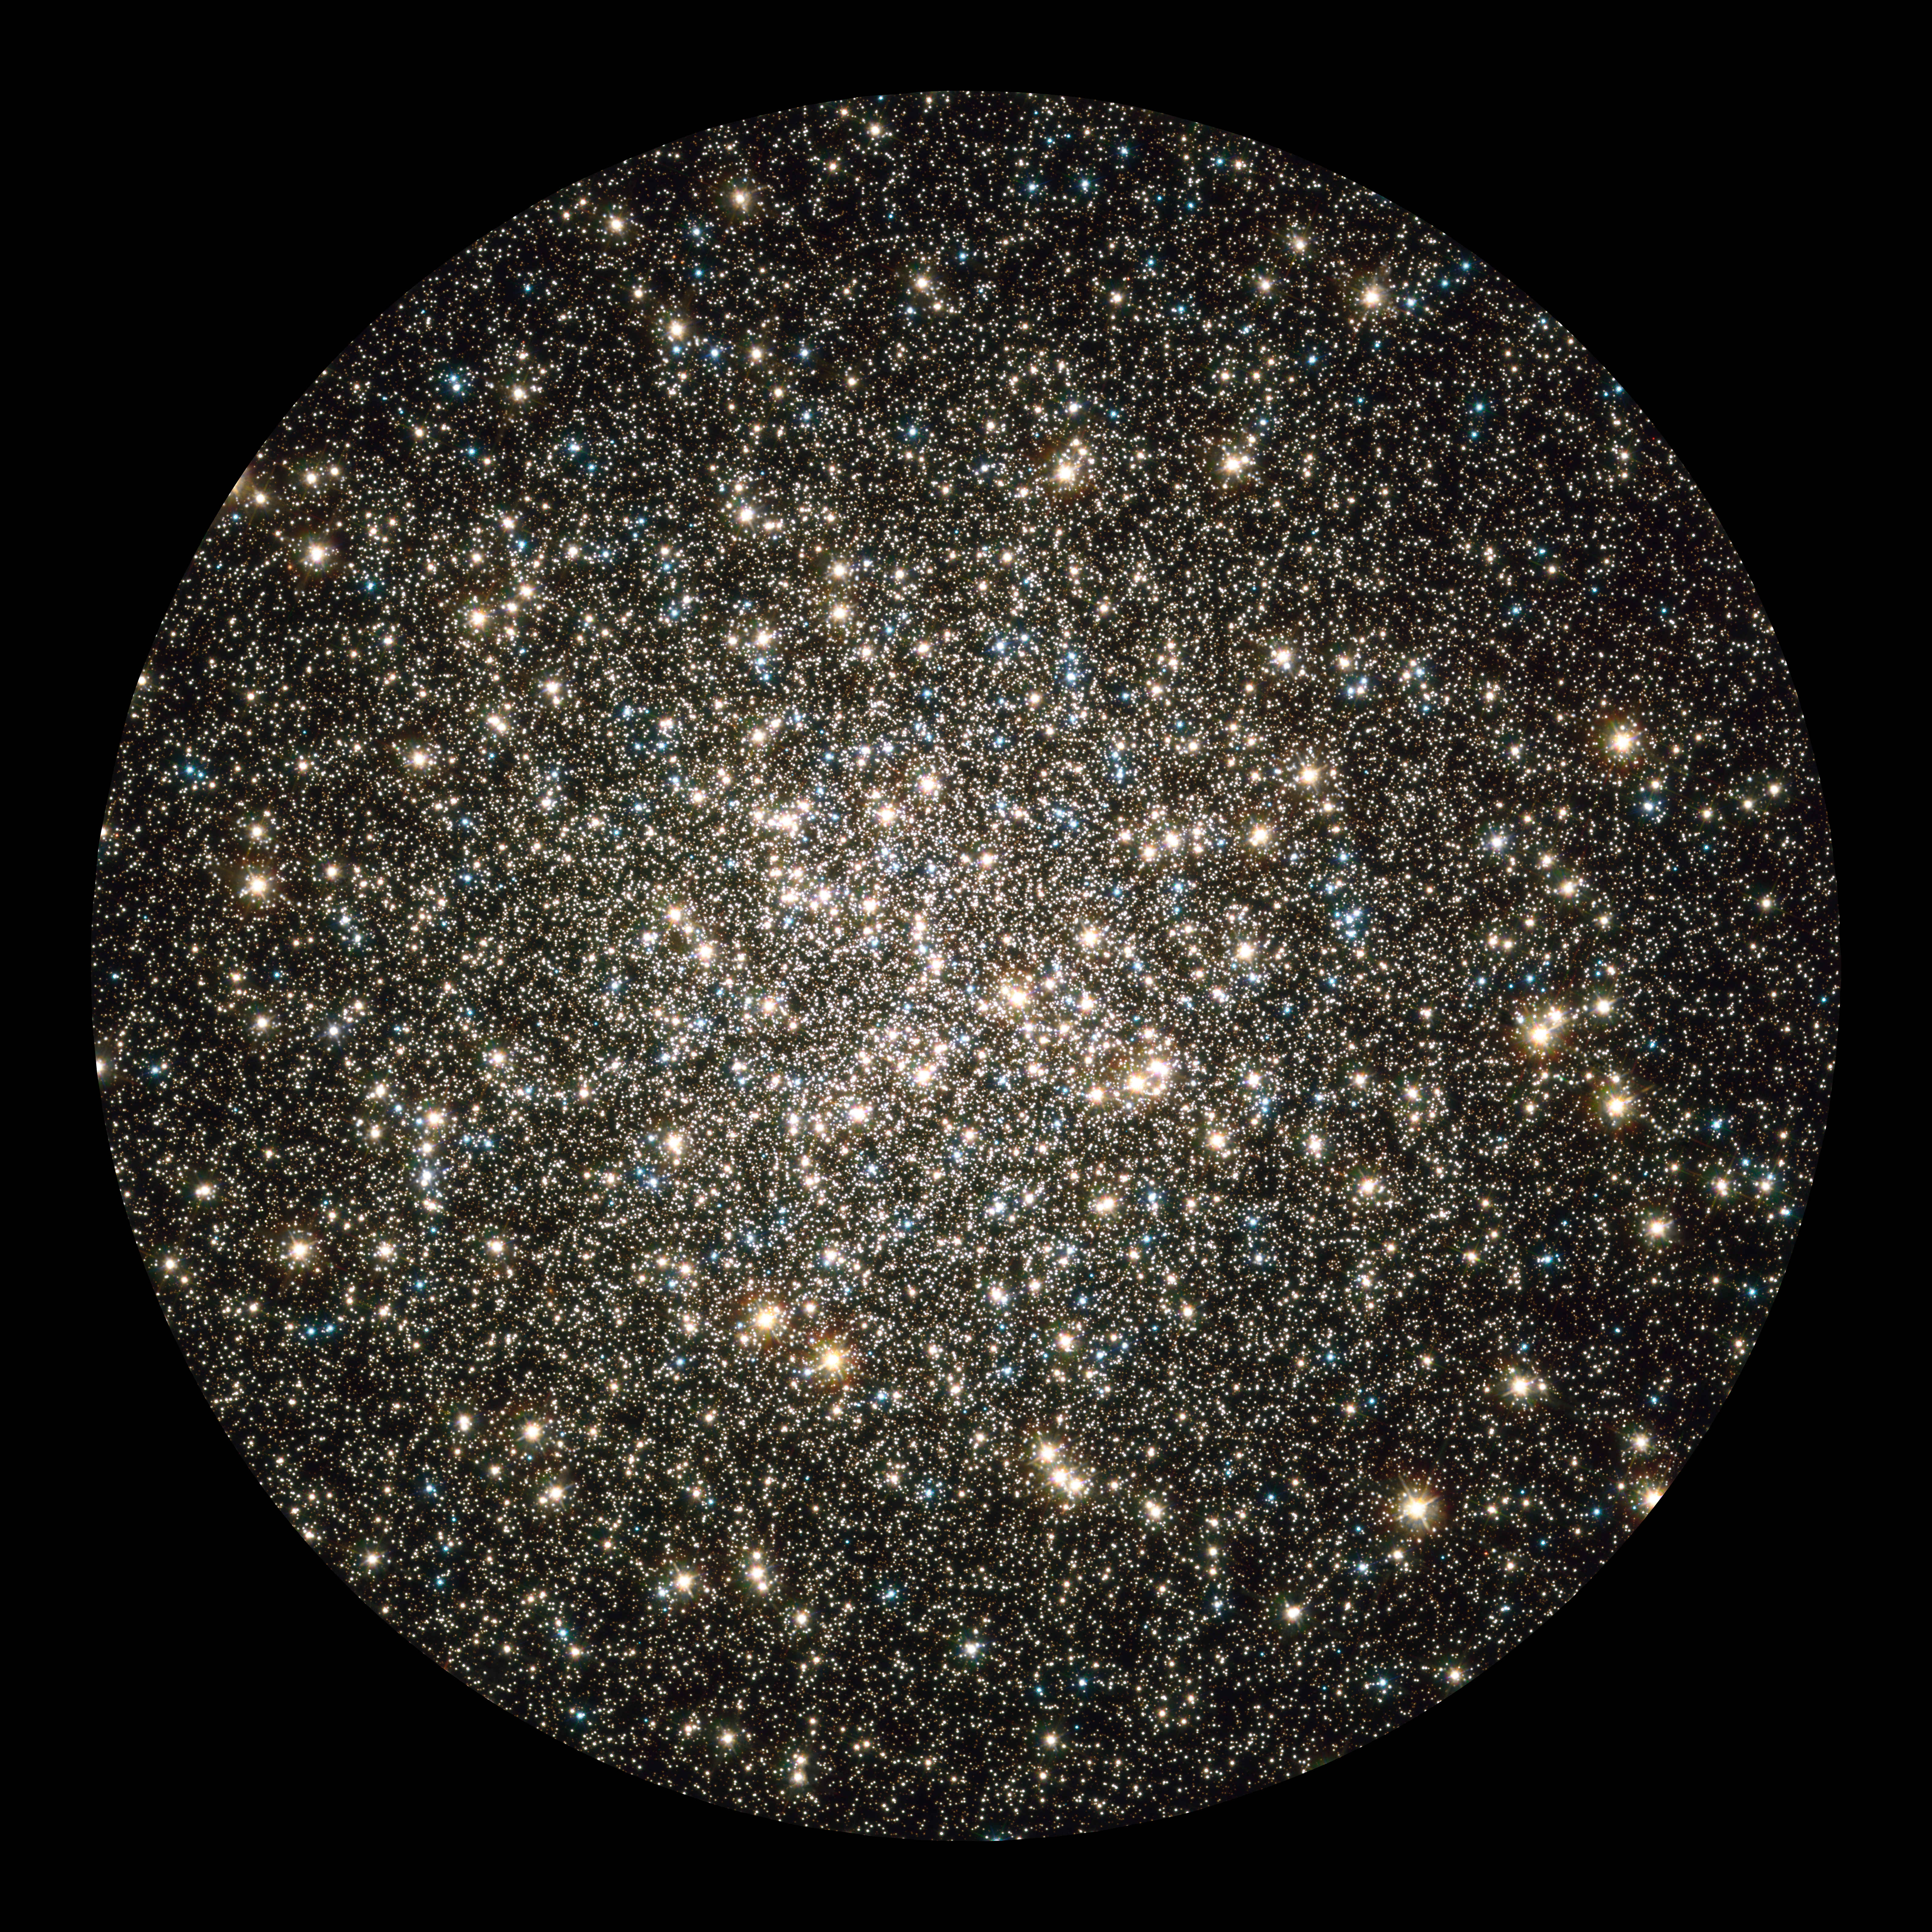

Hubble image of globular cluster M13

Like a whirl of shiny flakes sparkling in a snow globe, the NASA/ESA Hubble Space Telescope catches an instantaneous glimpse of many hundreds of thousands of stars moving about in the globular cluster M13, one of the brightest and best-known globular clusters in the northern sky. This glittering metropolis of stars is easily found in the winter sky in the constellation Hercules and can even be glimpsed with the unaided eye under dark skies.

M13 is home to over 100 000 stars and located at a distance of 25 000 light-years. These stars are packed so closely together in a ball, approximately 150 light-years across, that they will spend their entire lives whirling around in the cluster.

This image is a composite of archival Hubble data taken with the Wide Field Planetary Camera 2 and the Advanced Camera for Surveys. Observations from four separate science proposals taken in November 1999, April 2000, August 2005, and April 2006 were used. The image includes broadband filters that isolate light from the blue, visible, and infrared portions of the spectrum.

Credit: NASA, ESA, and the Hubble Heritage Team (STScI/AURA)